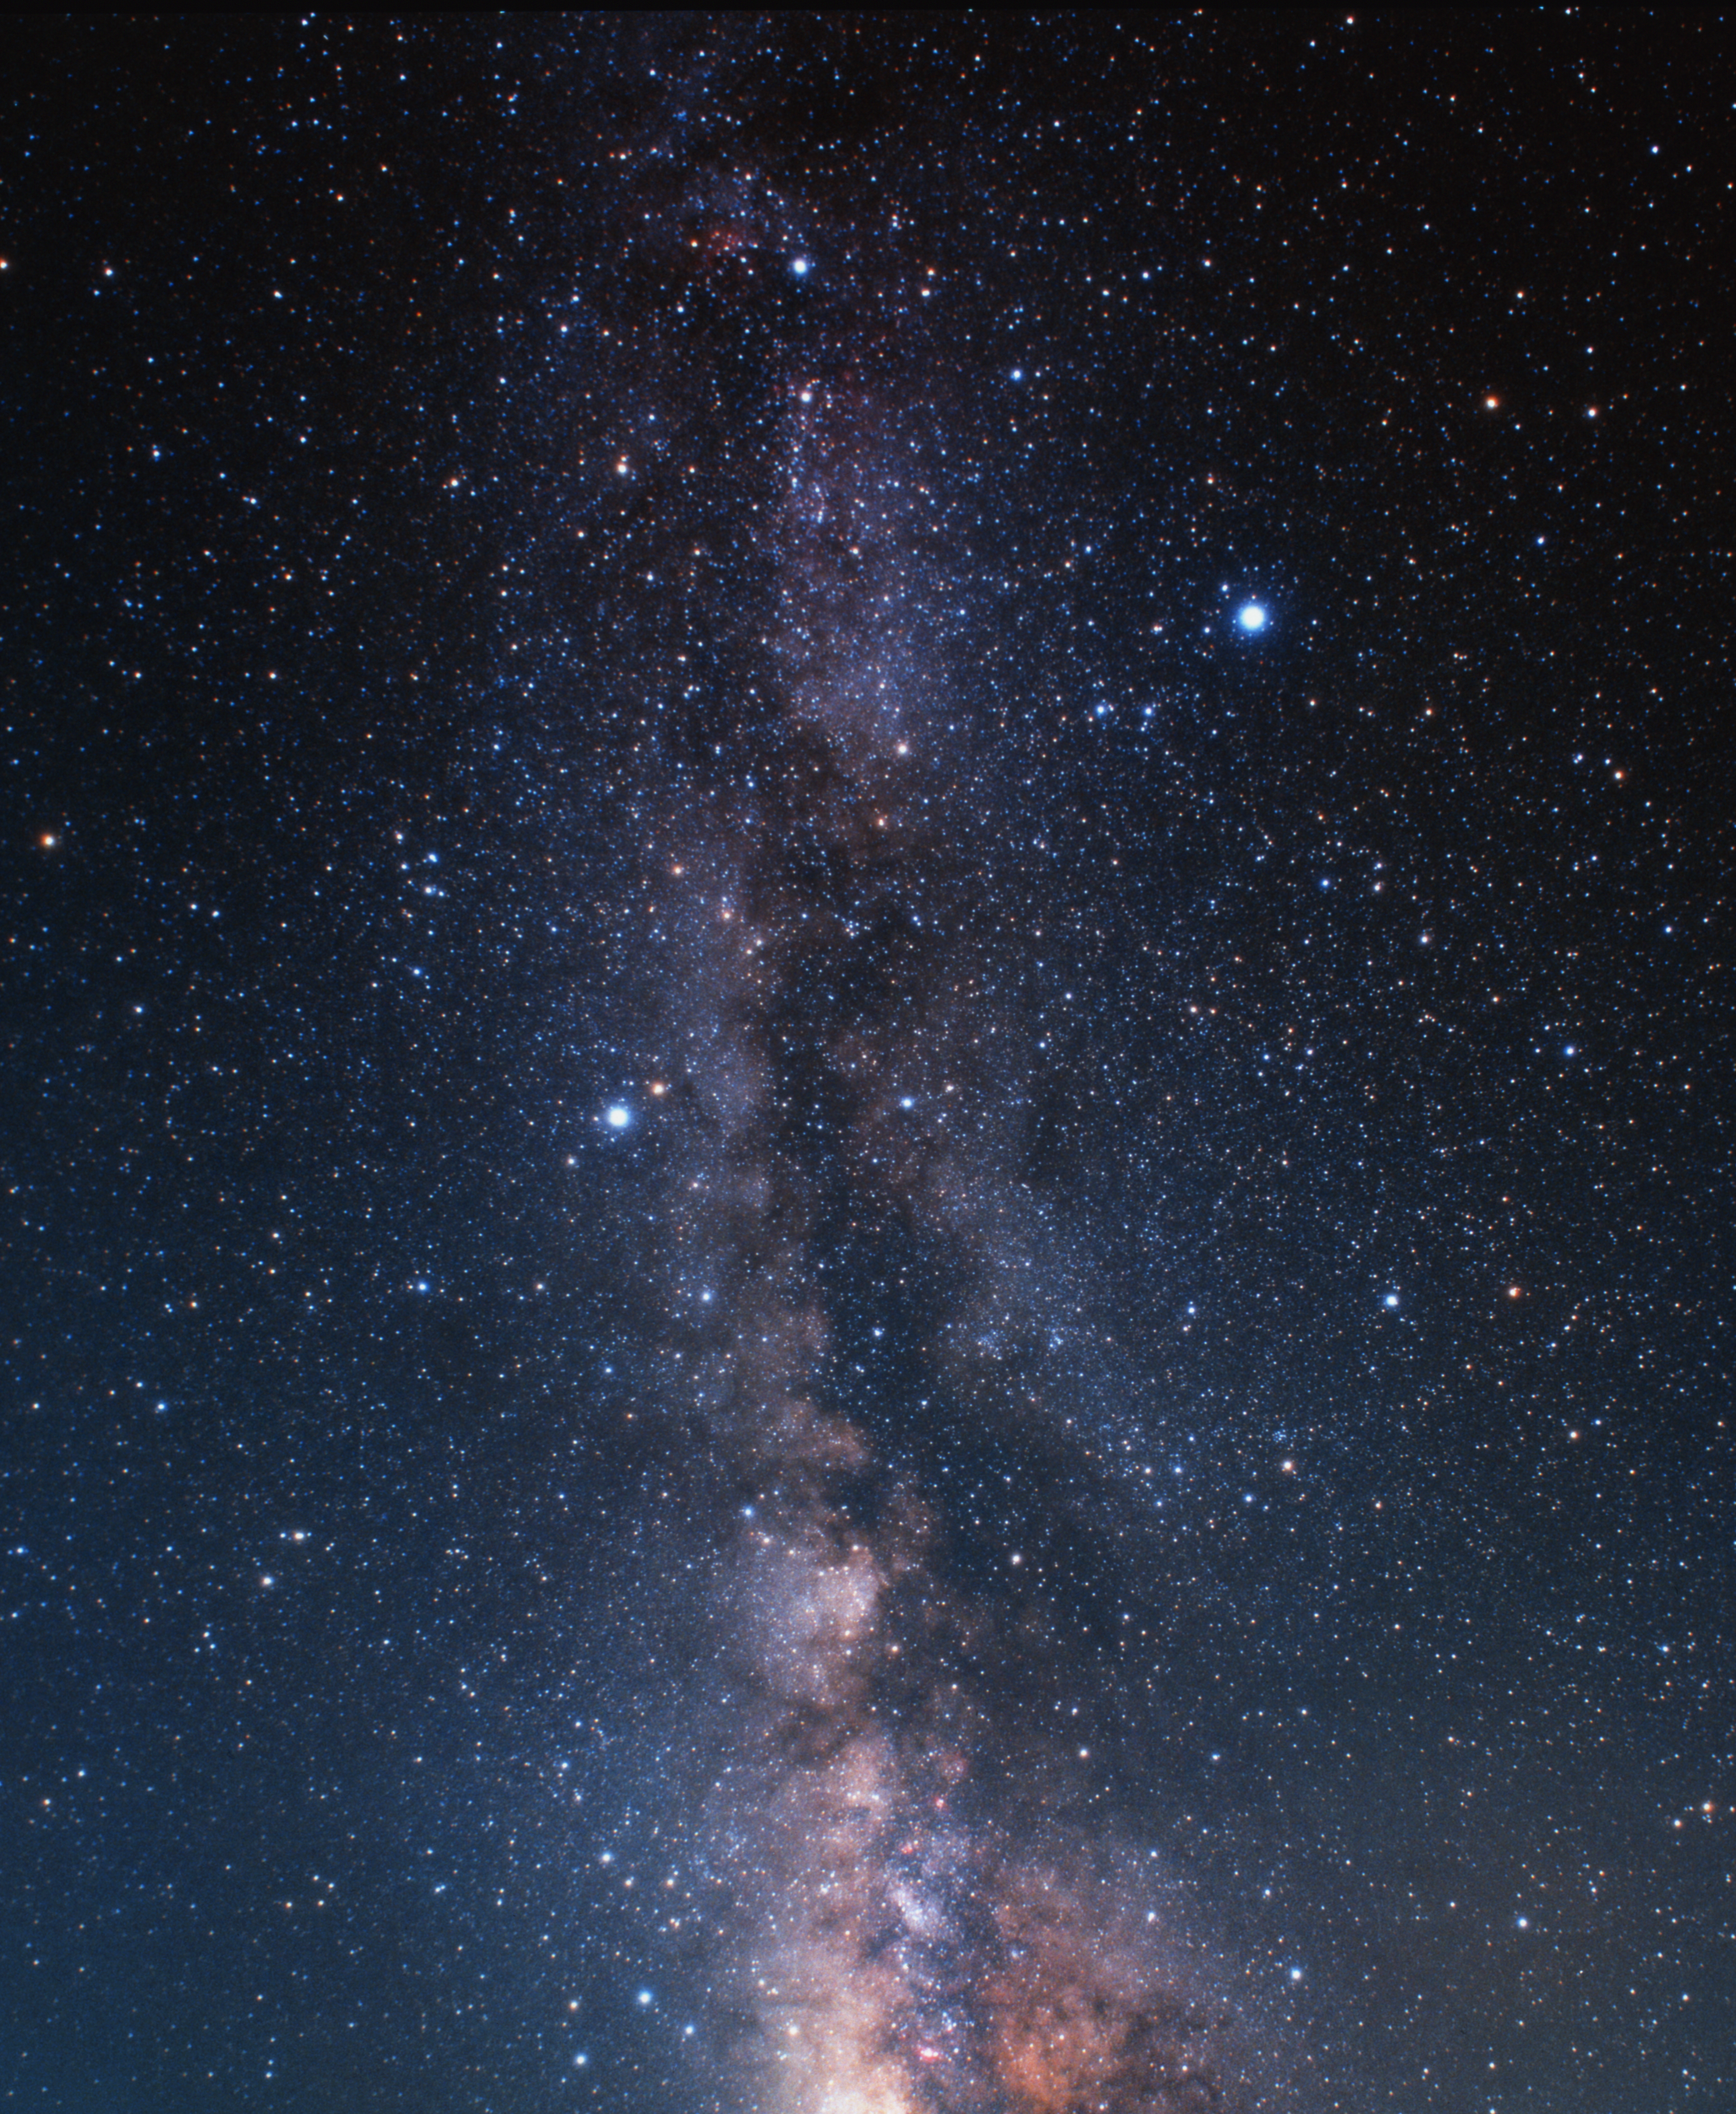

Milky-Way towards the constellation of Cygnus (ground-based image)

A wide-field ground-based image of the Milky Way plane. The constellation of Cygnus, where the veil nebula is located, appears in the top of the image.

Credit: A. Fujii